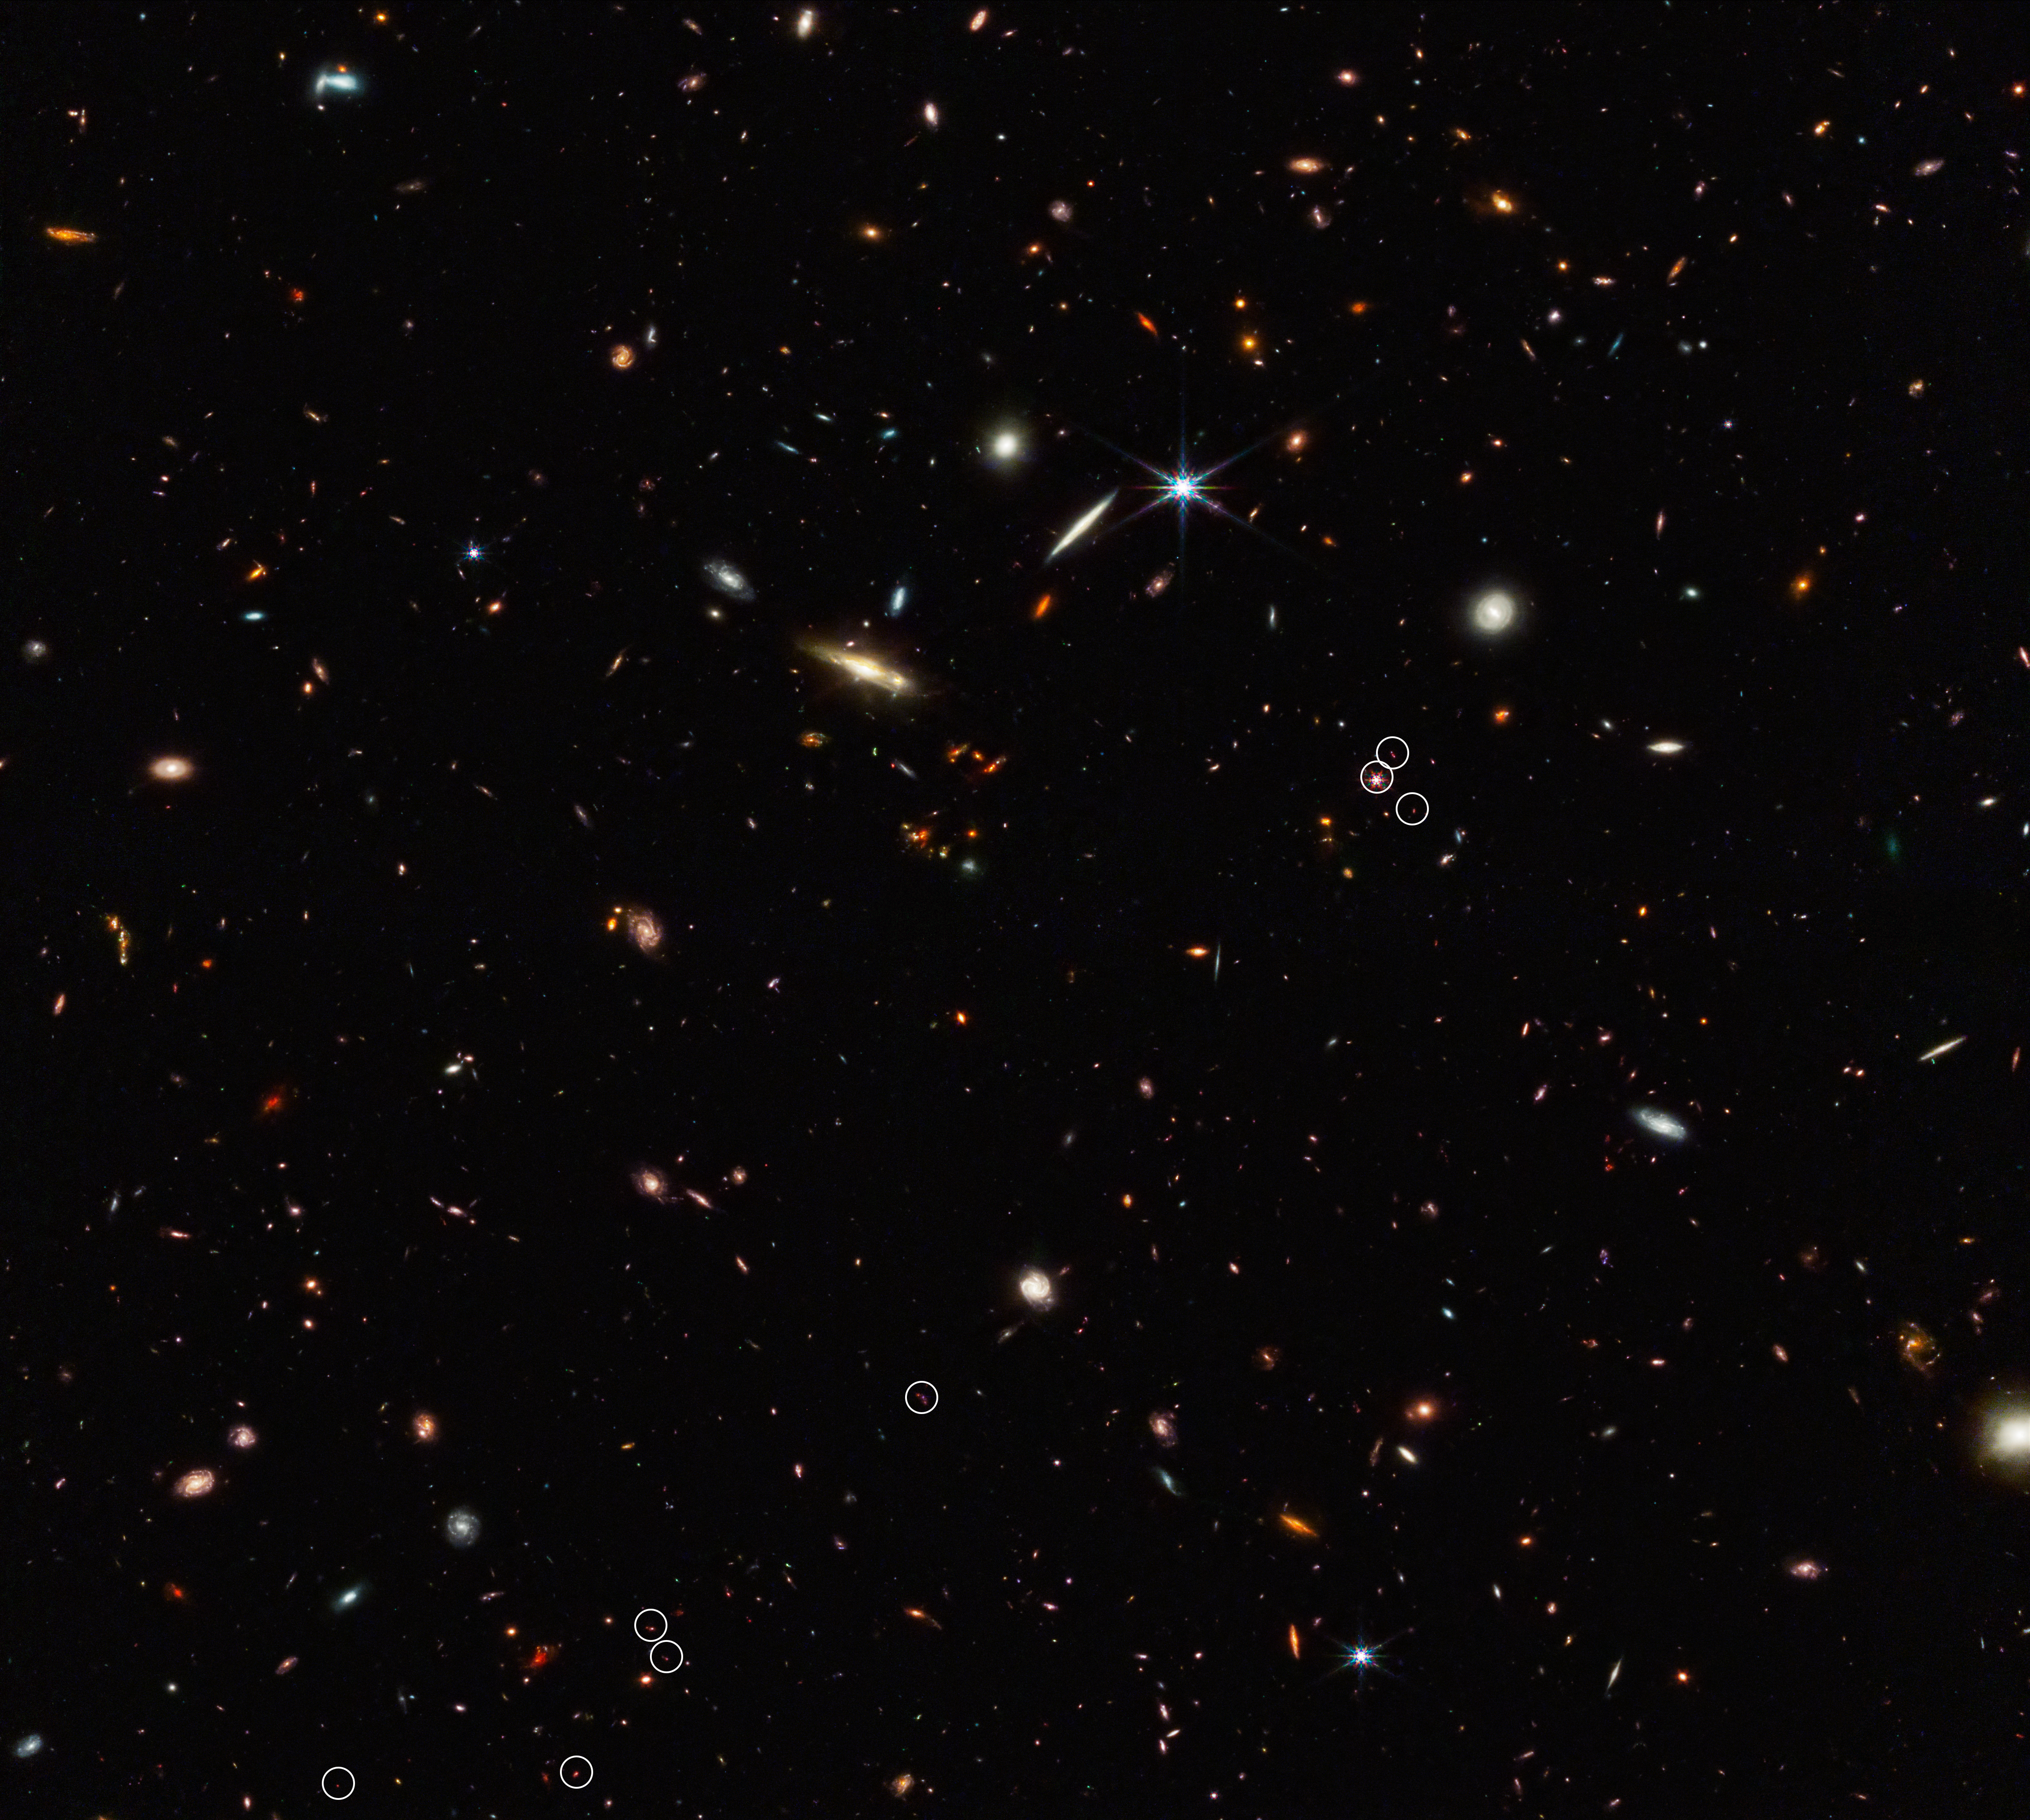

Webb identifies the earliest strands of the cosmic web (annotated)

Galaxies are not scattered randomly across the universe. They gather together not only into clusters, but into vast interconnected filamentary structures with gigantic barren voids in between. This “cosmic web” started out tenuous and became more distinct over time as gravity drew matter together.

Astronomers for the ASPIRE program using the NASA/ESA/CSA James Webb Space Telescope have discovered a thread-like arrangement of 10 galaxies that existed just 830 million years after the Big Bang. This deep galaxy field from Webb’s NIRCam (Near-Infrared Camera) shows an arrangement of these 10 distant galaxies marked by eight white circles in a diagonal, thread-like line. (Two of the circles contain more than one galaxy.) This 3 million light-year-long filament is anchored by a very distant and luminous quasar – a galaxy with an active, supermassive black hole at its core. The quasar, called J0305-3150, appears in the middle of the cluster of three circles on the right side of the image. Its brightness outshines its host galaxy. The 10 marked galaxies existed just 830 million years after the big bang. The team believes the filament will eventually evolve into a massive cluster of galaxies.

These results were published in two papers in The Astrophysical Journal Letters on 29 June 2023.

Credit: NASA, ESA, CSA, F. Wang (University of Arizona)